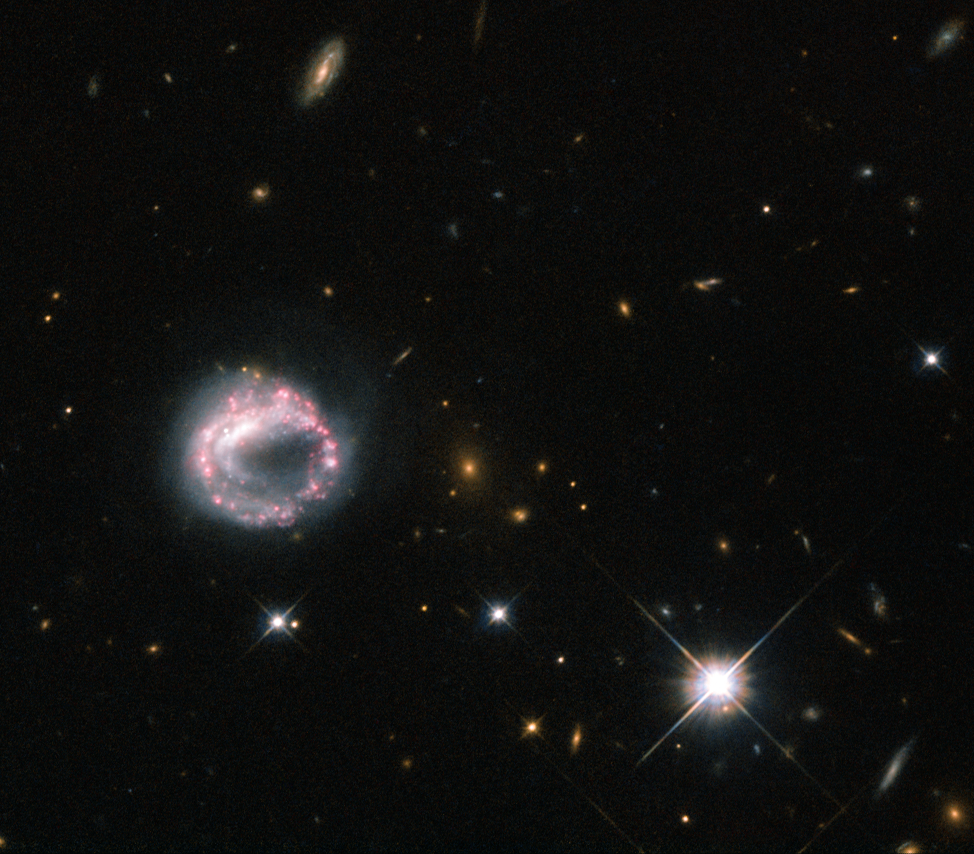

One ring to rule them all

Galaxies can take many forms — elliptical blobs, swirling spiral arms, bulges, and discs are all known components of the wide range of galaxies we have observed using telescopes like the NASA/ESA Hubble Space Telescope. However, some of the more intriguing objects in the sky around us include ring galaxies like the one pictured above — Zw II 28.

Ring galaxies are mysterious objects. They are thought to form when one galaxy slices through the disc of another, larger, one — as galaxies are mostly empty space, this collision is not as aggressive or as destructive as one might imagine. The likelihood of two stars physically colliding is minimal, and it is instead the gravitational effects of the two galaxies that causes the disruption.

This disruption upsets the material in both galaxies, causing it to redistribute to form a dense central core, encircled by bright stars. All this commotion causes clouds of gas and dust to collapse and triggers new periods of intense star formation in the outer ring, which is thus full of hot, young, blue stars and regions that are actively giving rise to new stars.

The sparkling pink and purple loop of Zw II 28 is not a typical ring galaxy due to its lack of a visible central companion. For many years it was thought to be a lone circle on the sky, but observations using Hubble have shown that there may be a possible companion lurking just inside the ring, where the loop appears to double back on itself. The galaxy has a knotty, swirling ring structure, with some areas appearing much brighter than others.

A version of this image was entered into the Hubble’s Hidden Treasures image processing competition by contestant Judy Schmidt.

Credit: ESA/Hubble & NASA Acknowledgement: Judy Schmidt